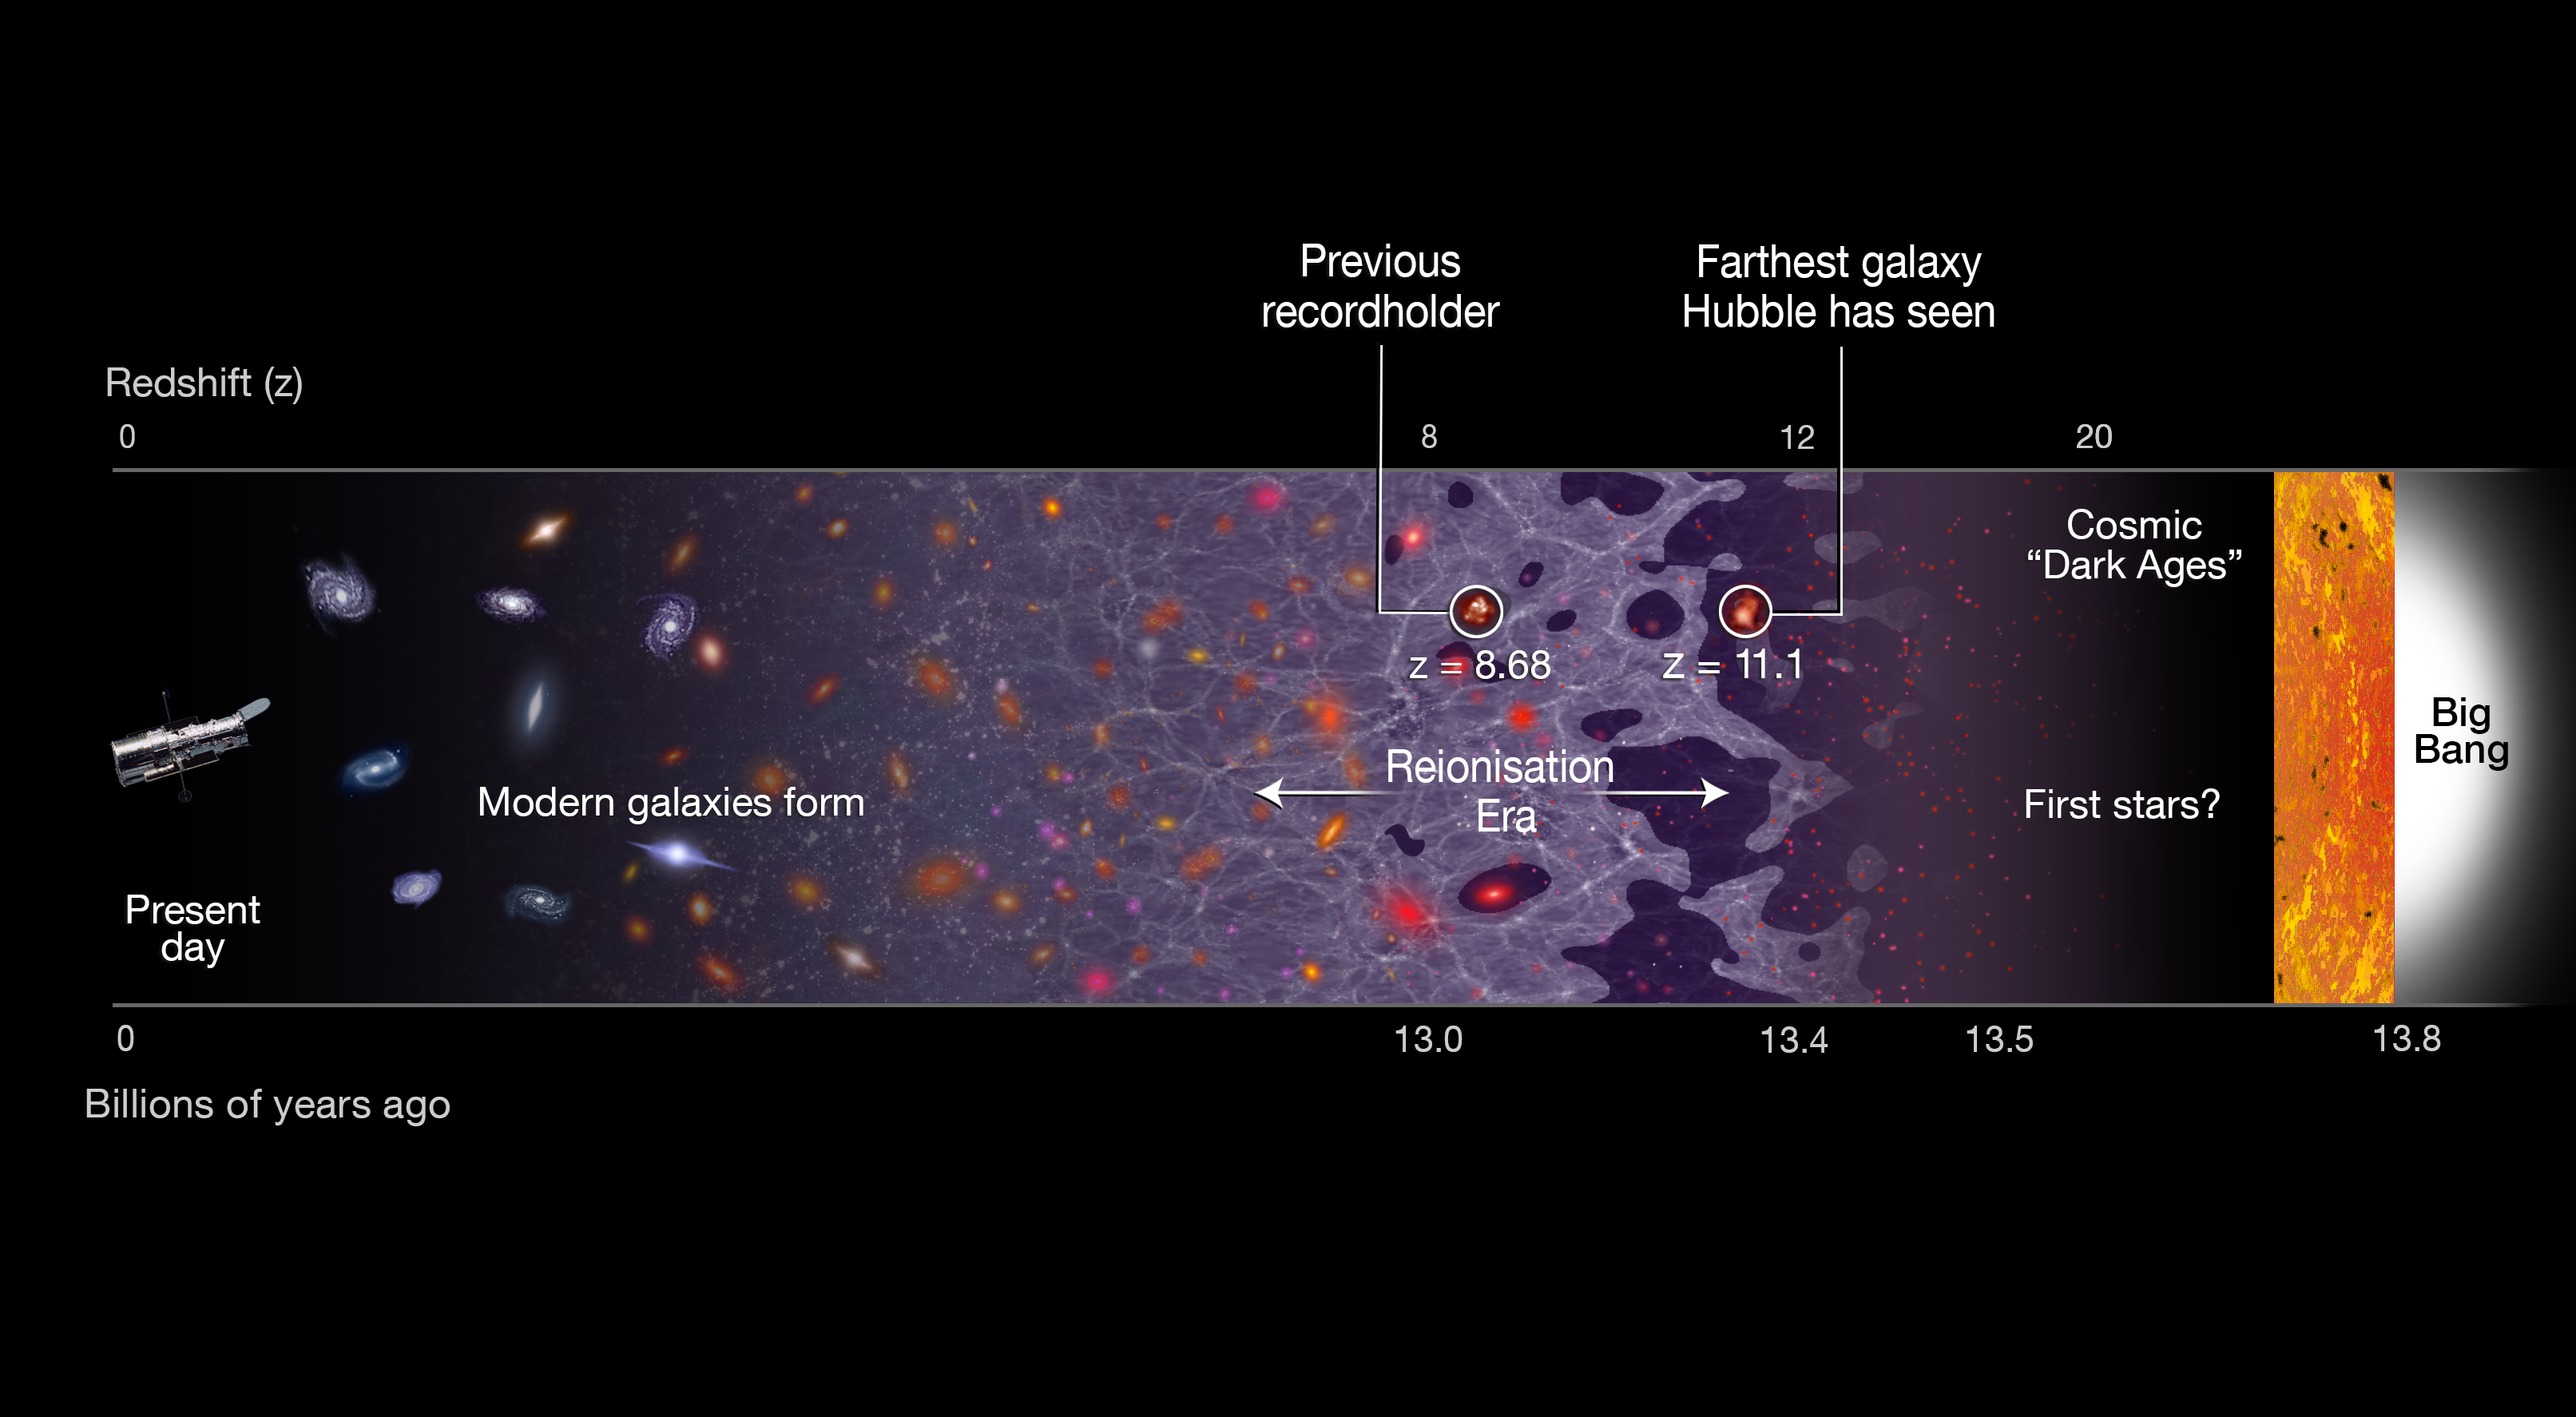

Hubble spectroscopically confirms remotest galaxy today

This illustration shows a timeline of the Universe, stretching from the present day (left) back to the Big Bang, 13.8 billion years ago (right). The newly discovered galaxy GN-z11 is the most distant galaxy discovered so far, at a redshift of 11.1, which corresponds to 400 million years after the Big Bang. The previous record holder’s position is also identified.

Its remote position puts GN-z11 at the beginning of the reionisation era. In this period starlight from the first galaxies started to heat and lift the fog of cold hydrogen gas filling the Universe. The previous record-holding galaxy was seen in the middle of this epoch, about 150 million years later.

Credit: NASA, ESA, and A. Feild (STScI)